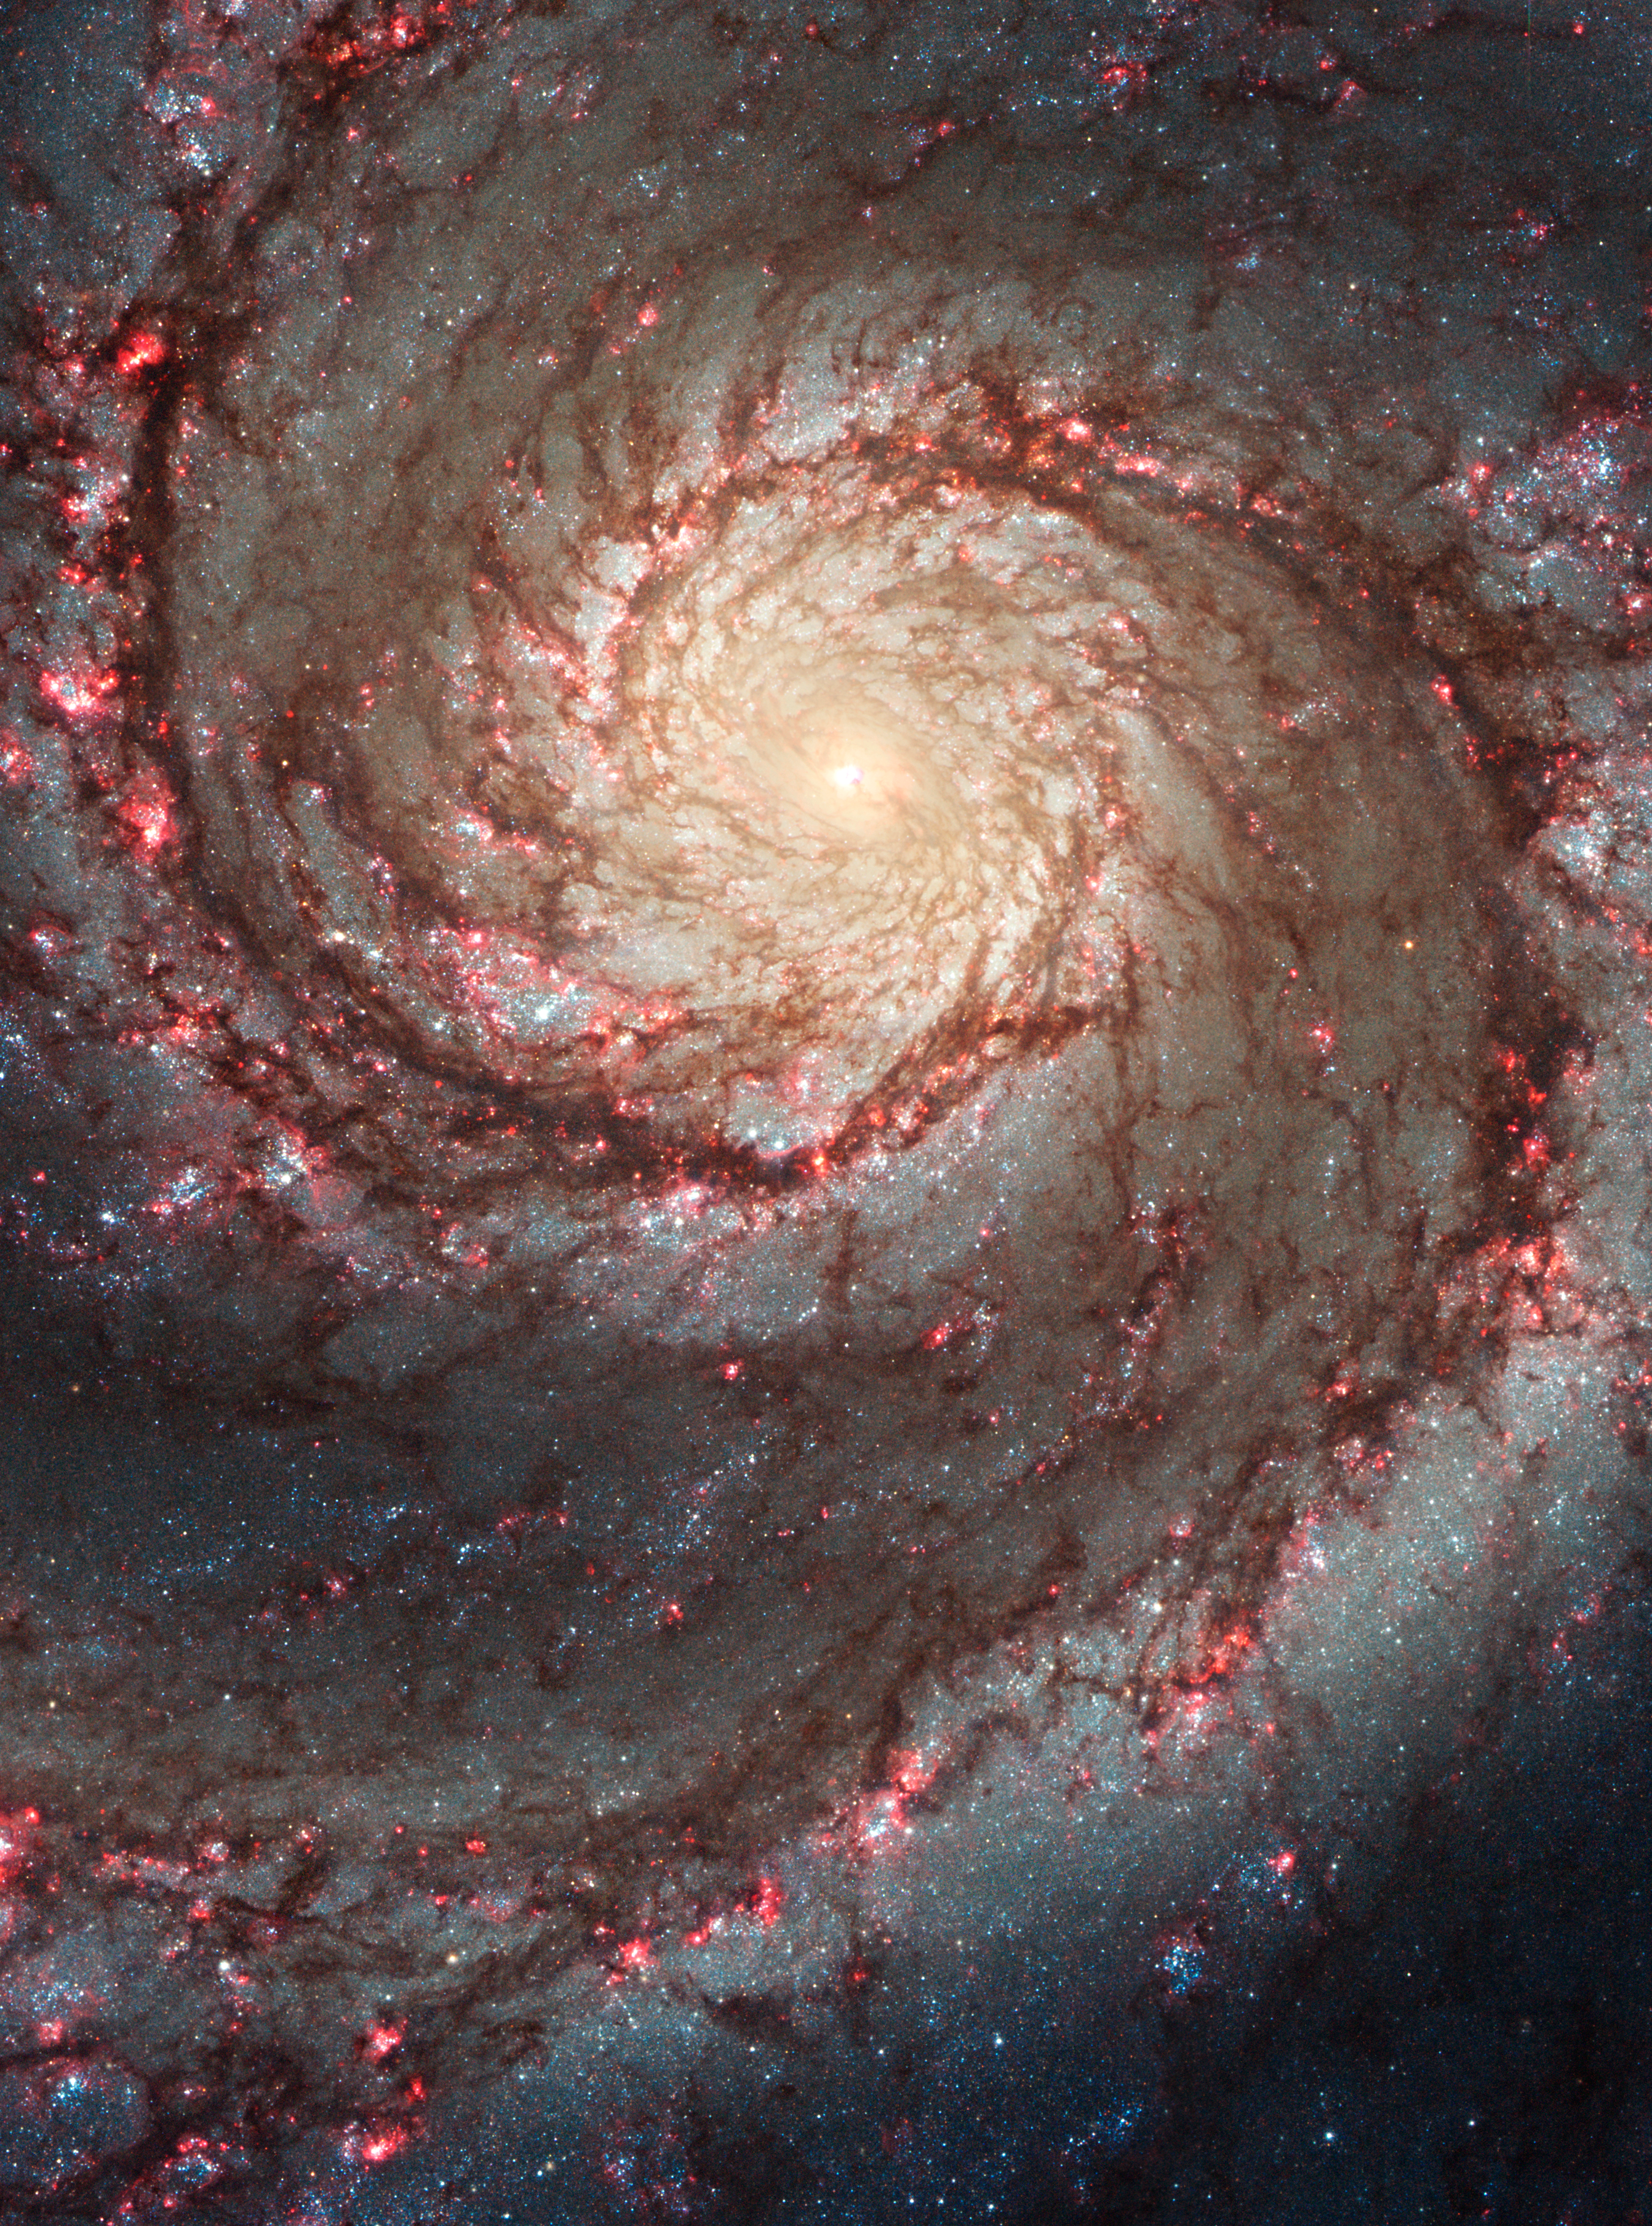

Hubble ACS visible image of M51

This image by NASA's Hubble Space Telescope shows a face-on view of the spiral galaxy M51, dubbed the Whirlpool Galaxy.

Taken in visible light, it highlights the attributes of a typical spiral galaxy, including graceful, curving arms, pink star-forming regions, and brilliant blue strands of star clusters.

Credit: NASA, ESA, S. Beckwith (STScI) and the Hubble Heritage Team (STScI/AURA)